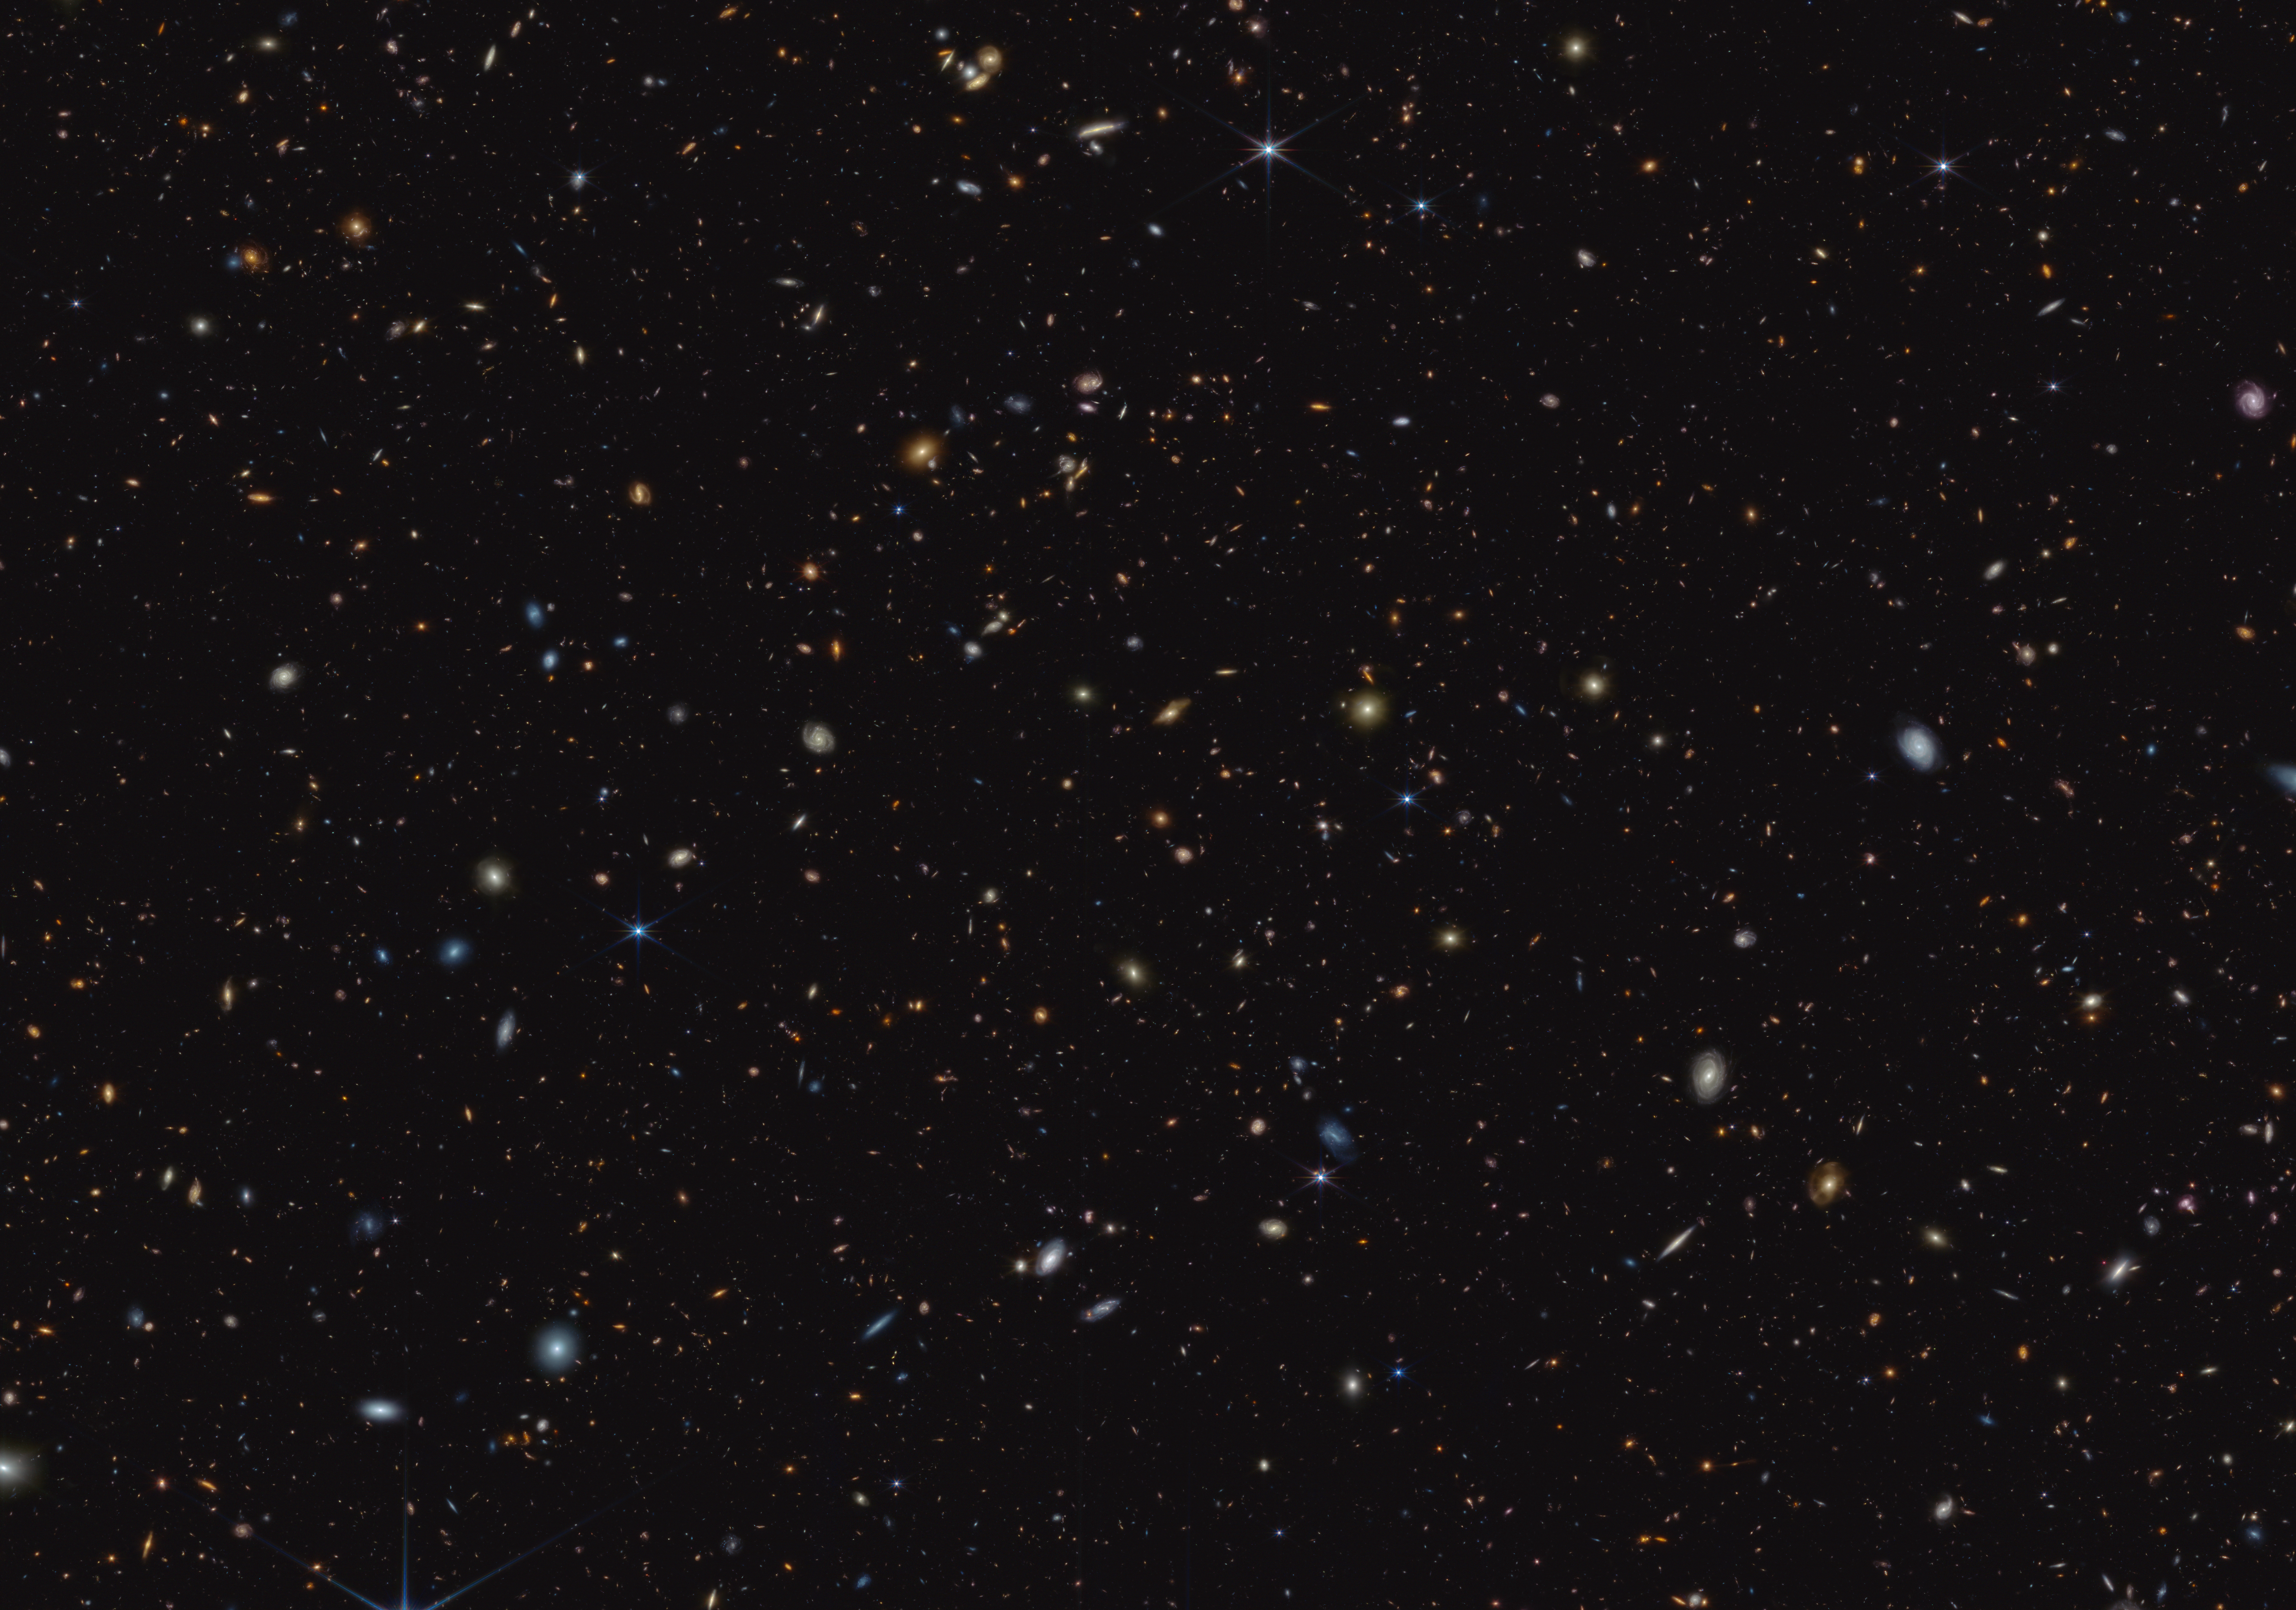

GOODS-S field (NIRCam image)

How did the first stars and galaxies form? The NASA/ESA/CSA James Webb Space Telescope is already providing new insights into this question. One of the largest programs in Webb’s first year of science is the JWST Advanced Deep Extragalactic Survey, or JADES, which will devote about 32 days of telescope time to uncover and characterize faint, distant galaxies. While the data are still coming in, JADES already has discovered hundreds of galaxies that existed when the Universe was less than 600 million years old. The team also has identified galaxies sparkling with a multitude of young, hot stars.

This infrared image shows a portion of an area of the sky known as GOODS-South, which has been well studied by the NASA/ESA Hubble Space Telescope and other observatories. More than 45,000 galaxies are visible here.

Using these and other data, the JADES team has discovered hundreds of galaxies that existed when the Universe was less than 600 million years old. The sheer number of these galaxies was far beyond predictions from observations made before Webb’s launch. The team also has identified galaxies that existed during a time known as the Epoch of Reionization, when the Universe underwent a transformation from opaque to transparent. Many of these galaxies shown unusually strong emission line signatures due to the creation of multitudes of hot, massive stars.

In this image, blue, green, and red were assigned to Webb’s NIRCam (Near-Infrared Camera) data at 0.9, 1.15, and 1.5 microns; 2.0, 2.77, and 3.55 microns; and 3.56, 4.1, and 4.44 microns (F090W, F115W, and F150W; F200W, F277W, and F335M; and F356W, F410M, and F444W), respectively.

Credit: NASA, ESA, CSA, B. Robertson (UC Santa Cruz), B. Johnson (Center for Astrophysics, Harvard & Smithsonian), S. Tacchella (University of Cambridge, M. Rieke (Univ. of Arizona), D. Eisenstein (Center for Astrophysics, Harvard & Smithsonian), A. Pagan (STScI)